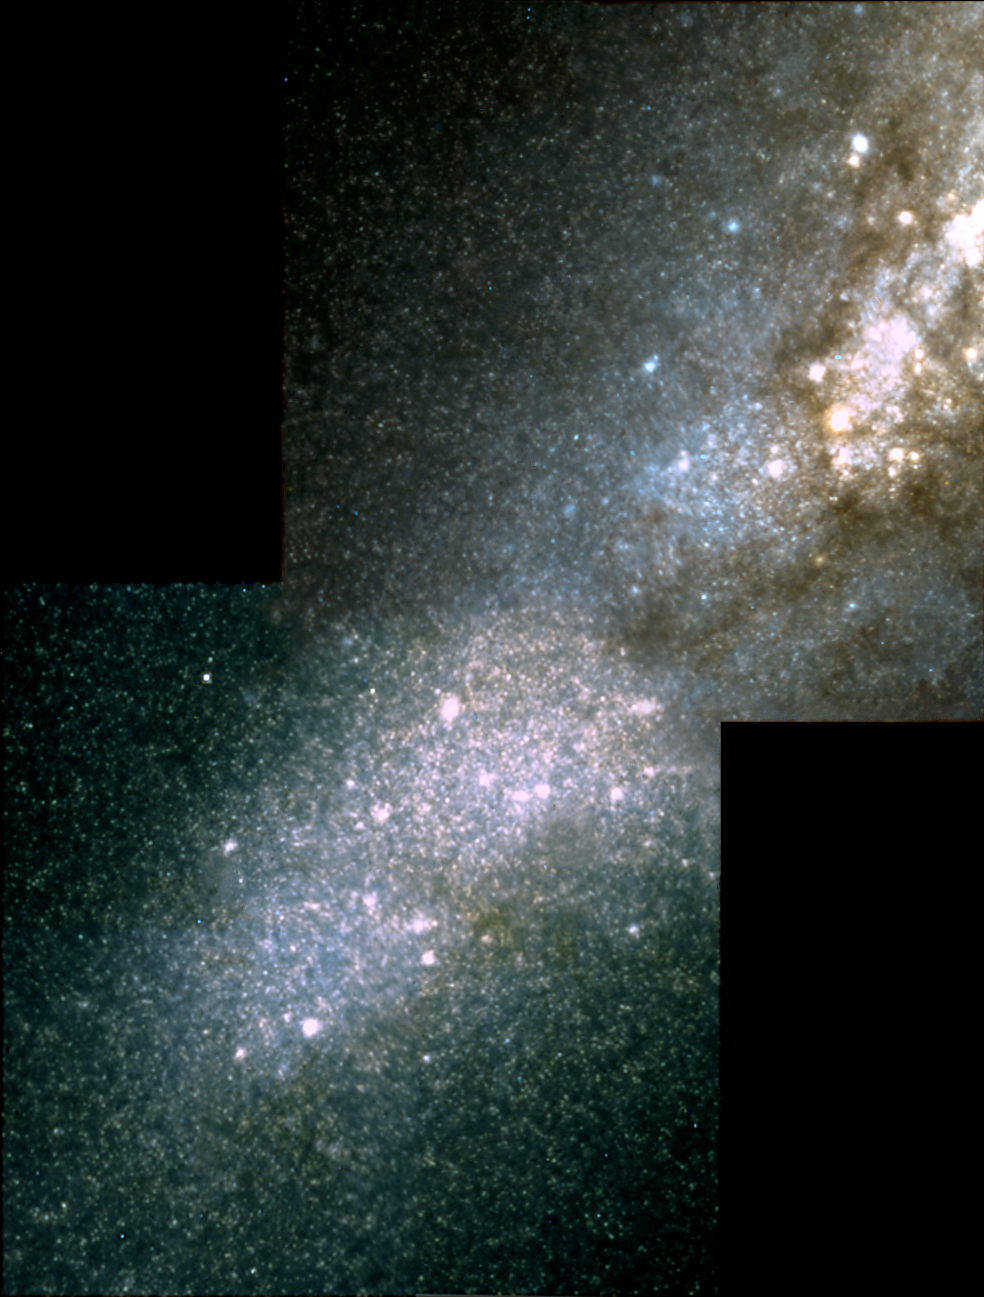

Hubble spies huge clusters of stars formed by ancient encounter

The NASA/ESA Hubble Space Telescope snapped this view of the heart of the galaxy M82. The image was taken in infrared light with the telescope's Near Infrared Camera and Multi-Object Spectrometer (NICMOS). Hubble peered through thick dust lanes to find some of the galaxy's more than 100 super star clusters. The clusters are the larger white dots scattered throughout the picture. They were formed during a violent encounter with the galaxy M81 about 600 million years ago. The thousands of stars in the galactic background belong to a population of red giant stars in M82. The galaxy is 12 million light-years from Earth in the constellation Ursa Major. The pictures were taken on September 15, 1997. Two images each composed of eight exposures were combined for the NICMOS mosaic: 768 seconds in J (1.1 micron - here coloured blue) and 768 seconds in H (1.6 micron - here coloured red) in total. Green is constructed from a mix of J and H. This image is issued jointly by NASA and ESA.

Credit: NASA, ESA, R. de Grijs (Institute of Astronomy, Cambridge, UK)